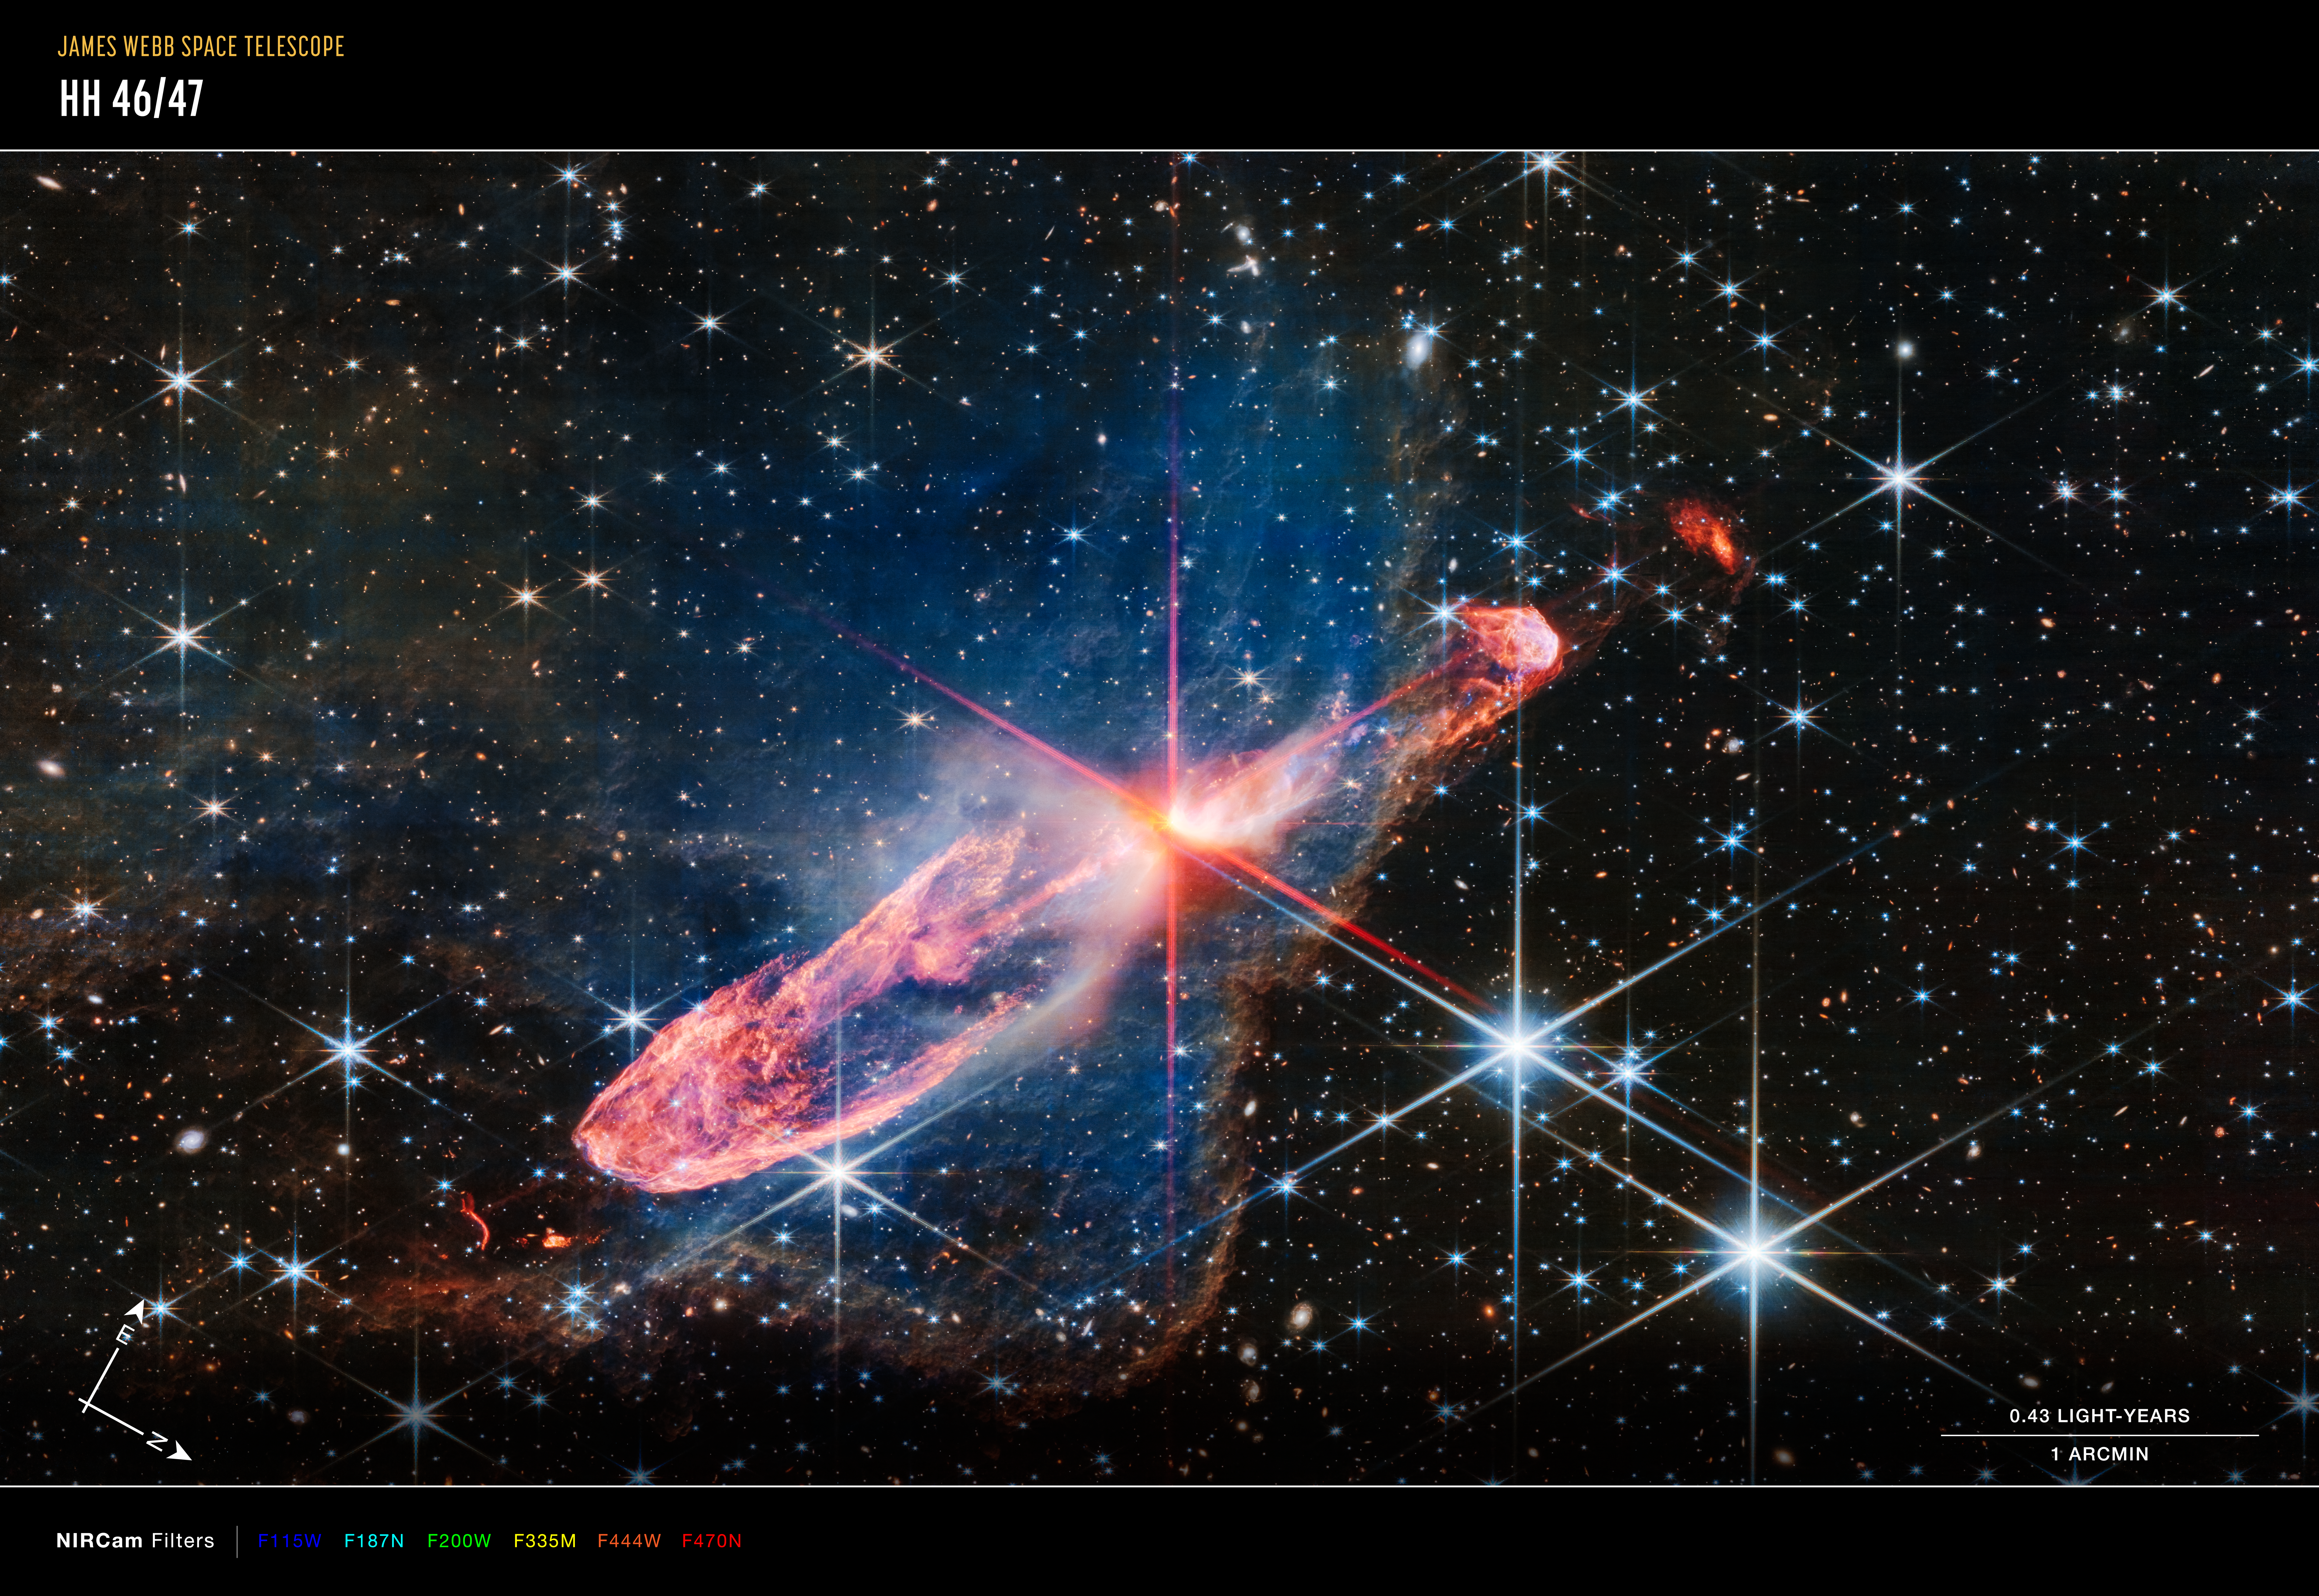

Herbig-Haro 46/47 (NIRCam image - annotated)

The NASA/ESA/CSA James Webb Space Telescope has captured a high-resolution image of a tightly bound pair of actively forming stars, known as Herbig-Haro 46/47, in near-infrared light. Look for them at the centre of the red diffraction spikes. The stars are buried deeply, appearing as an orange-white splotch. They are surrounded by a disc of gas and dust that continues to add to their mass.

Six near-infrared images from NIRCam (the Near-Infrared Camera) aboard the James Webb Space Telescope make up this composite of Herbig-Haro 46/47.

The north and east compass arrows show the orientation of the image on the sky. Note that the relationship between north and east on the sky (as seen from below) is flipped relative to direction arrows on a map of the ground (as seen from above).

This image shows invisible near-infrared wavelengths of light that have been translated into visible-light colours. The colour key shows which NIRCam filters were used when collecting the light. The colour of each filter name is the visible light colour used to represent the infrared light that passes through that filter.

The scale bar is labelled in arcminutes, which is a measure of angular distance on the sky. One arcminute is 1/60 of one degree. (The full Moon has an angular diameter of about 30 arcminutes.) The actual size of an object that covers one arcminute on the sky depends on its distance from the telescope.

Herbig-Haro 46/47 is an important object to study because it is relatively young — only a few thousand years old. Stars take millions of years to form. Targets like this also give researchers insight into how stars gather mass over time, potentially allowing them to model how our own Sun, a low-mass star, formed.

The two-sided orange lobes were created by earlier ejections from these stars. The stars’ more recent ejections appear as blue, thread-like features, running along the angled diffraction spike that covers the orange lobes. Actively forming stars ingest the gas and dust that immediately surrounds them in a disc (imagine an edge-on circle encasing them). When the stars ‘eat’ too much material in too short a time, they respond by sending out two-sided jets along the opposite axis, settling down the star’s spin, and removing mass from the area. Over millennia, these ejections regulate how much mass the stars retain.

Don’t miss the delicate, semi-transparent blue cloud. This is a region of dense dust and gas, known as a nebula. Webb’s crisp near-infrared image lets us see through its gauzy layers, showing off a lot more of Herbig-Haro 46/47, while also revealing a wide range of stars and galaxies that lie far beyond it. The nebula’s edges transform into a soft orange outline, like a backward L along the right and bottom of the image.

The blue nebula influences the shapes of the orange jets shot out by the central stars. As ejected material rams into the nebula on the lower left, it takes on wider shapes, because there is more opportunity for the jets to interact with molecules within the nebula. Its material also causes the stars’ ejections to light up.

Over millions of years, the stars in Herbig-Haro 46/47 will form fully — clearing the scene.

Take a moment to linger on the background. A profusion of extremely distant galaxies dot Webb’s view. Its composite NIRCam (Near-Infrared Camera) image is made up of several exposures, highlighting distant galaxies and stars. Blue objects with diffraction spikes are stars, and the closer they are, the larger they appear. White-and-pink spiral galaxies sometimes appear larger than these stars, but are significantly farther away. The tiniest red dots, Webb’s infrared specialty, are often the oldest, most distant galaxies.

Credit: NASA, ESA, CSA, J. DePasquale (STScI)